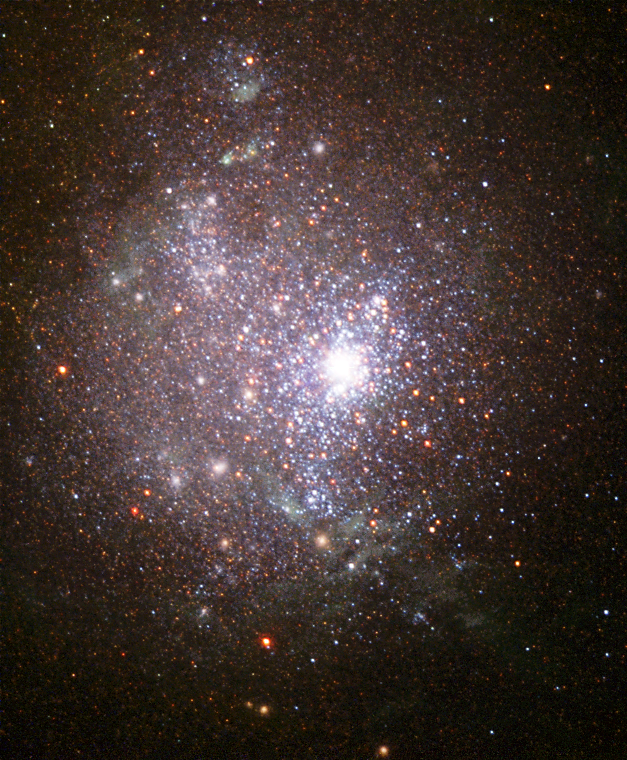

Blaze of stars in an old galaxy's core

The central region of the small galaxy NGC 1705 blazes with the light of thousands of young and old stars. Astronomers call NGC 1705 a dwarf irregular, that is, a small galaxy lacking regular structure. Knowing how dwarf irregular galaxies evolve tells us a lot about galaxy formation and evolution. At 17 million light-years away, the individual stars of the galaxy NGC 1705 are out of range of all but the sharp eyes of the NASA/ESA Hubble Space Telescope. NGC 1705 is an ideal laboratory to conduct investigations on the history of star formation. Young, blue, hot stars are strongly concentrated toward the galaxy's centre. Older, red, cooler stars are more spread out. This galaxy has been forming new stars throughout its lifetime, but a burst of star-formation activity occurred as recently as 26 to 31 million years ago. This 'starburst' is responsible for many of the young stars on the outskirts of this galaxy's core as well as the central giant star cluster. Many astronomers now believe that dwarf galaxies were the first galaxies to collapse and start forming stars in the early Universe. They represent the building blocks from which more massive objects (spiral and elliptical galaxies) later formed. Nearby small galaxies are thought to be the leftovers of the galaxy-formation process. Dwarf irregular galaxies are probably fairly old stellar systems whose chemical and physical properties may be the result of the process of slow evolution. The Hubble observations of the stars in NGC 1705 and other close irregulars show that these galaxies are several thousand million years old. NGC 1705 could be as old as 13.5 thousand million years. Dwarf irregulars are similar in many ways to very young galaxies, but they are much nearer and easier to study. These galaxies seem to have consumed only a tiny part of their reservoir of gas. Their stars have a much lower fraction of heavy elements than does the Sun. Astronomers therefore think that only a few generations of stars have formed there over time. NGC 1705's age, its irregular shape, and proximity all make it an excellent source of knowledge about galaxy formation and evolution. This image was taken in March 1999 and November 2000 by an international science team led by Monica Tosi at Italy's National Institute of Astrophysics (INAF) at the Osservatorio Astronomico di Bologna. Other team members include Alessandra Aloisi (JHU), Mark Clampin (STScI), Laura Greggio (INAF, Osservatorio Astronomico di Padova), Claus Leitherer and Antonella Nota (STScI). Hubble's Wide Field Planetary Camera 2 observed the galaxy in ultraviolet, blue, visible, and infrared light. Although not included in this image, NICMOS (Near Infrared Camera and Multi Object Spectrometer) observations were also made of the galaxy's central core.

Credit: NASA, ESA and the Hubble Heritage Team STScI/AURA)